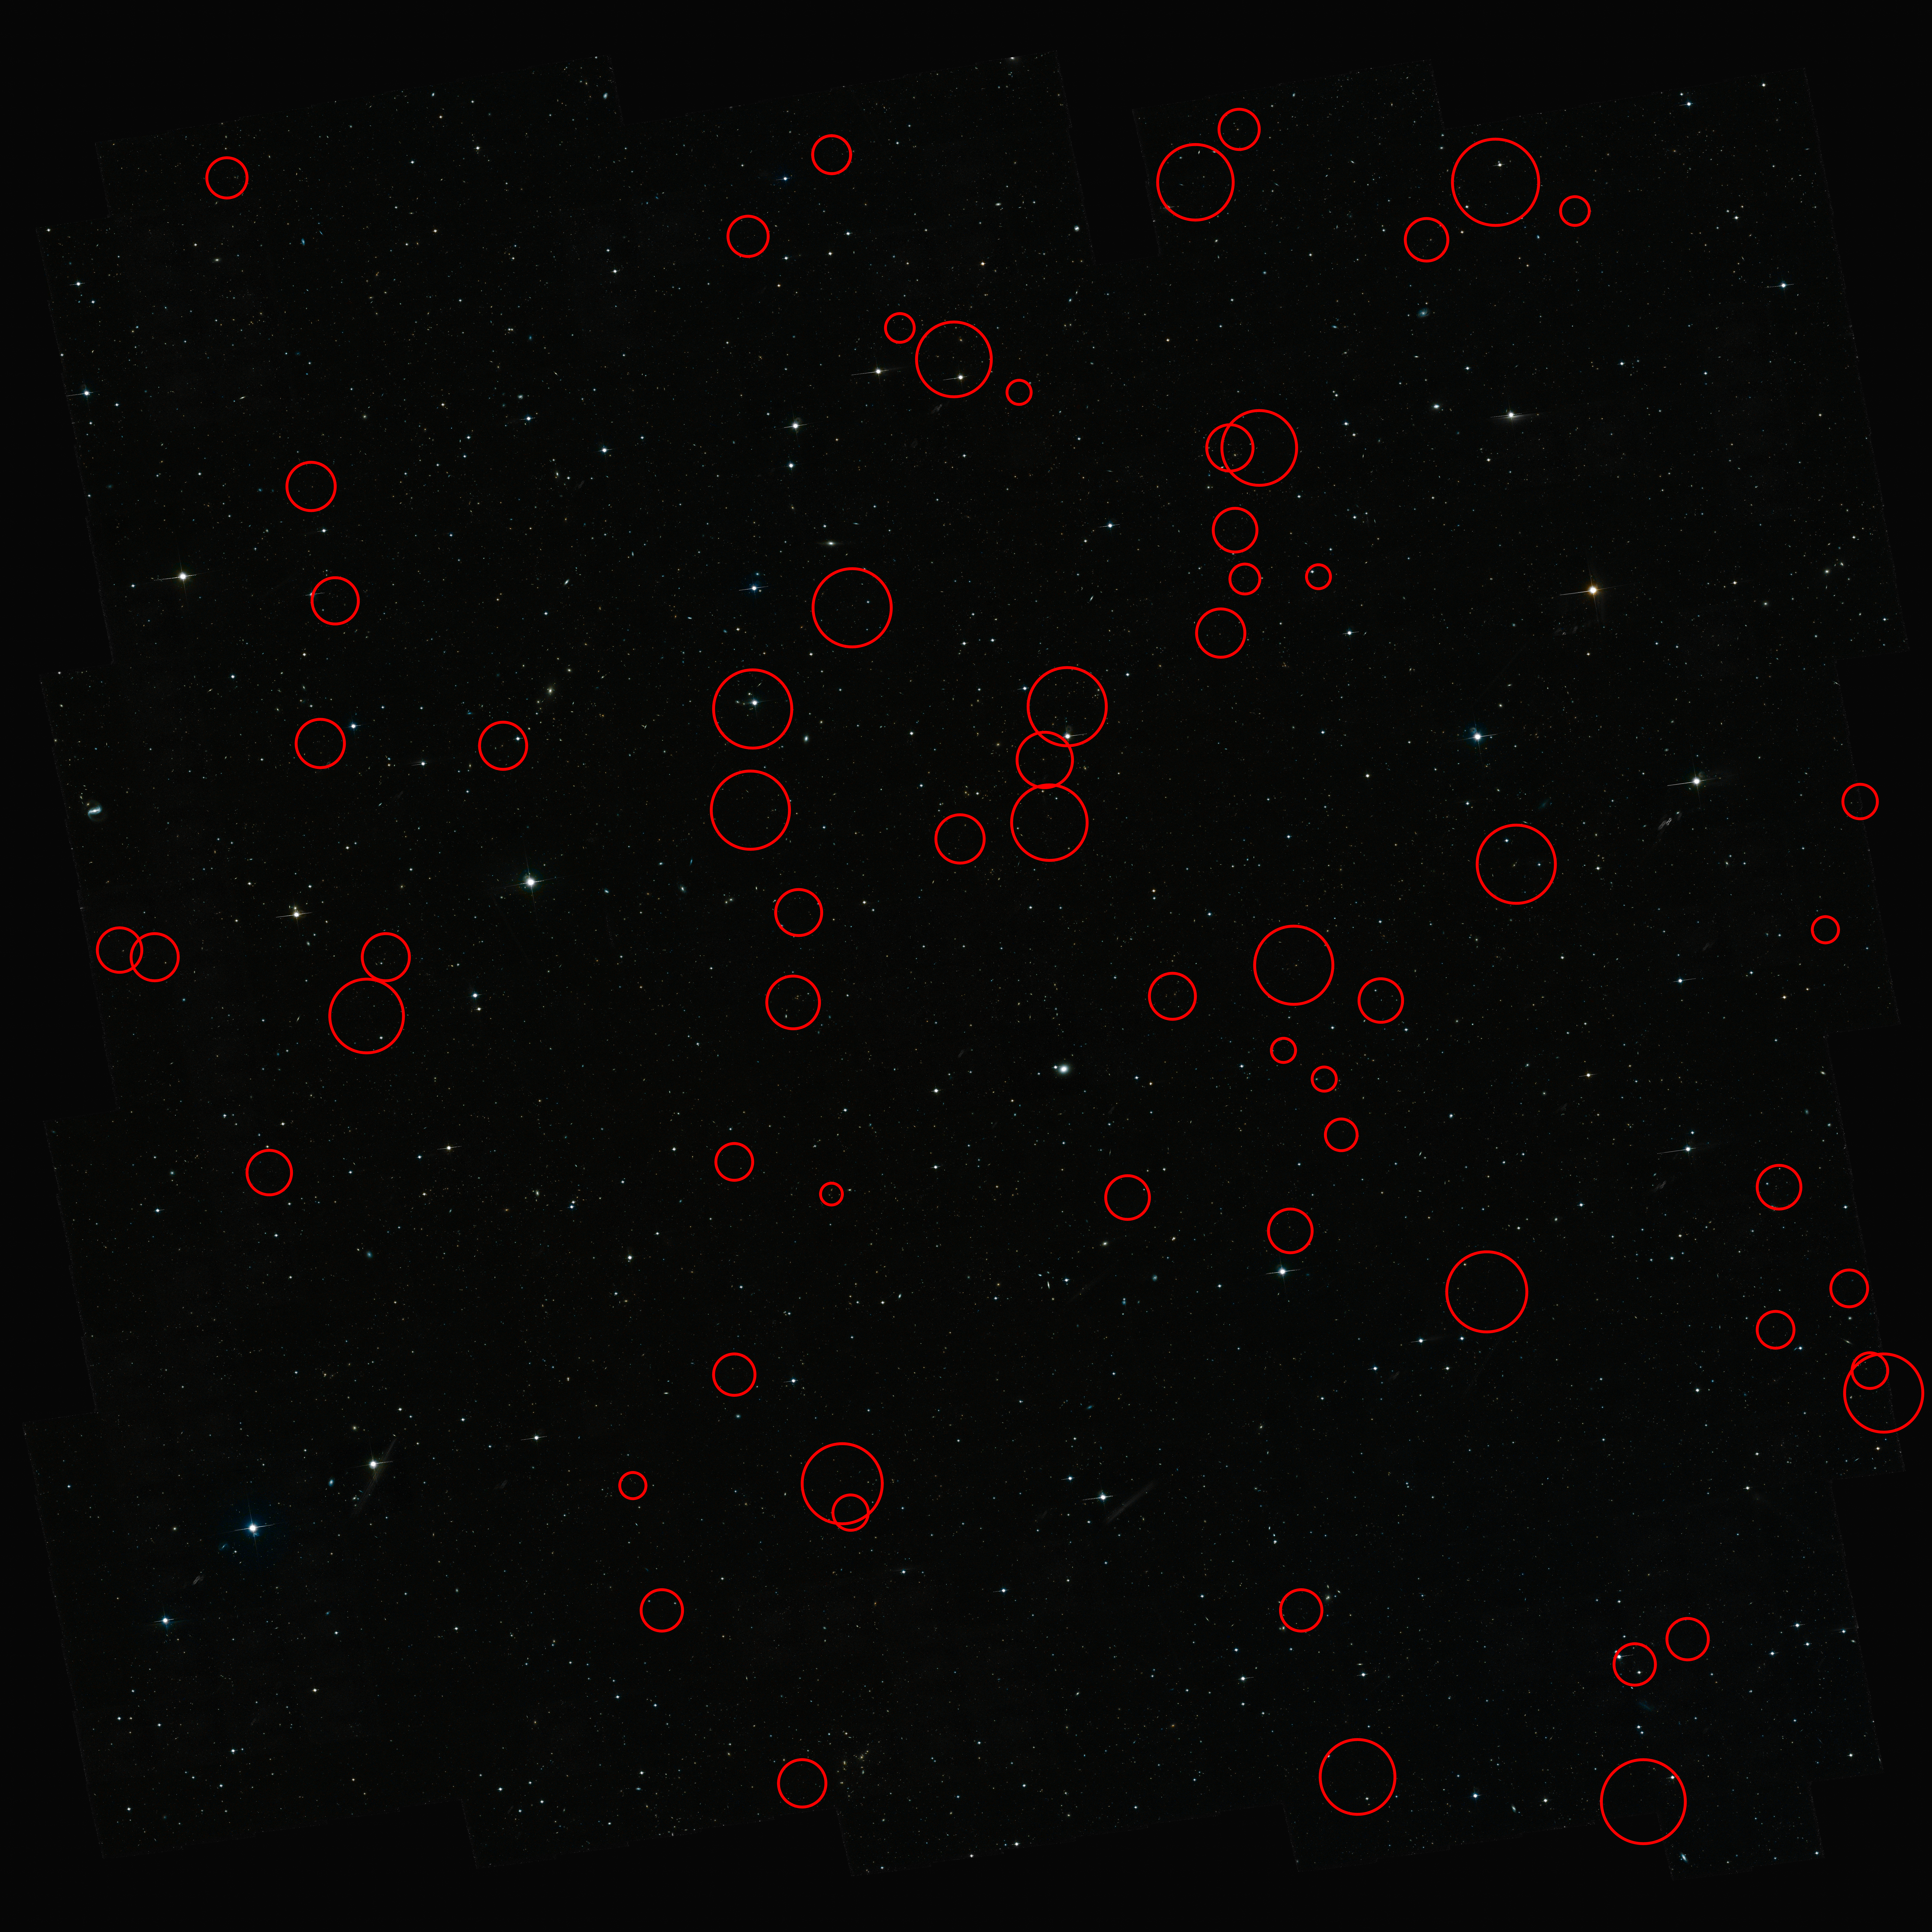

The New Gravitational Lenses from the COSMOS project

The positions of 67 newly found gravitational lenses are shown in this image. Use the zoom tool to examine them more closely.

Credit: NASA, ESA, C. Faure (Zentrum für Astronomie, University of Heidelberg) and J.P. Kneib (Laboratoire d'Astrophysique de Marseille)